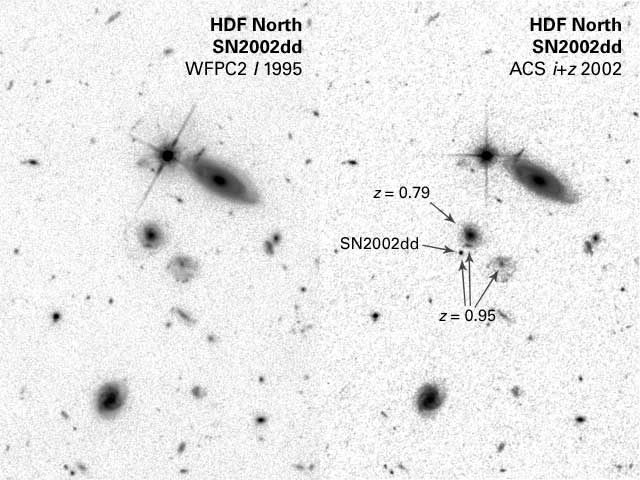

B&W version of WFPC2/ACS, both I-band, before and during SN, with labels

Black and white version of [Left] - A Hubble Space Telescope image of a portion of the Hubble Deep Field North as originally photographed in 1995 with the Wide Field Planetary Camera 2. [Right] - An image of the same field as imaged by Hubble's Advanced Camera for Surveys (ACS). The ACS observations were made in May and June 2002. The supernova is estimated to be 8 billion light-years away. Distant supernovae are used by astronomers to fill in the blank region where the universe's rate of expansion switched from deceleration due to gravity to acceleration due to the repulsive force of 'dark energy.'

Credit: NASA/ESA, J. Blakeslee (JHU) and Z. Levay (STScI)